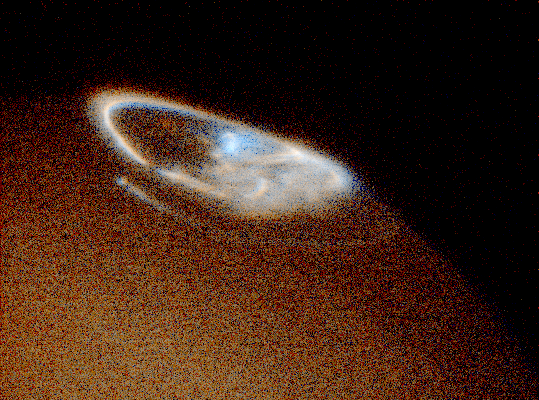

Hubble Provides Complete View of Jupiter's Auroras

Images taken in ultraviolet light by the Space Telescope Imaging Spectrograph (STIS) show both auroras, the oval- shaped objects in the inset photos. While the Hubble telescope has obtained images of Jupiter's northern and southern lights since 1990, the new STIS instrument is 10 times more sensitive than earlier cameras.

Credit: John Clarke (University of Michigan), and NASA/ESAJohn Clarke (Universityof Michigan), and NASA/ESA